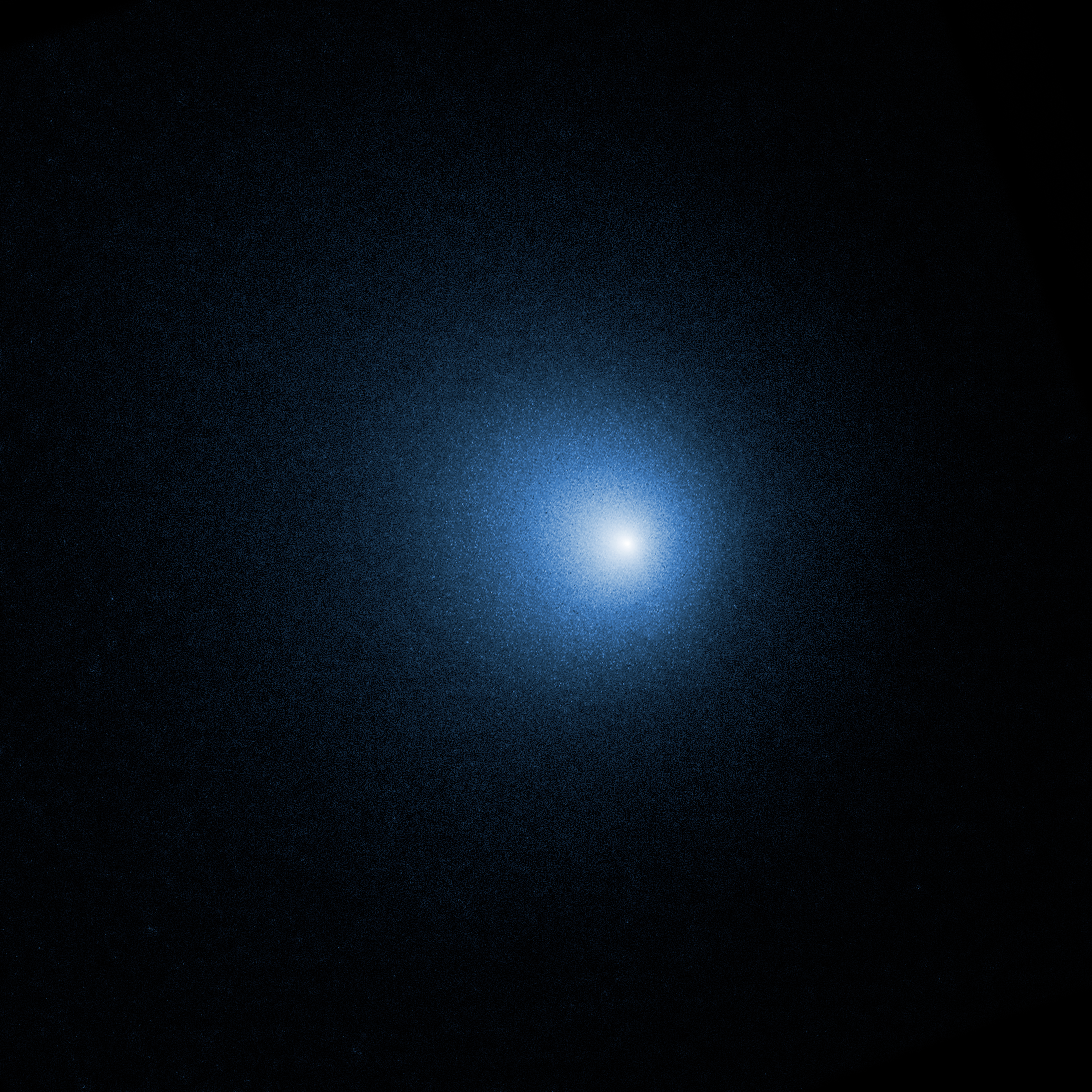

Comet 46P/Wirtanen

The NASA/ESA Hubble Space Telescope observed comet 46P/Wirtanen on 13 December 2018 when the comet was 12 million kilometers from Earth. In the image, the comet’s nucleus is hidden in the center of a fuzzy glow from the comet’s coma. The coma is a cloud of gas and dust that the comet has ejected during its pass through the inner Solar System due to heating from the Sun.

The inner part of a comet’s coma is normally not accessible from Earth. The close fly-by of comet 46P/Wirtanen allowed astronomers to study it in detail. They combined the unique capabilities of Hubble, NASA’s Chandra X-ray Observatory, and the Neil Gehrels-Swift observatory to study how gases are released from the nucleus, what the comet’s ices are composed of, and how gas in the coma is chemically altered by sunlight and solar radiation.

Comet 46P/Wirtanen made its closest approach to Earth on 16 December, when it passed just over 11 million kilometers from our planet, about 30 times farther away than the Moon. Although it is the brightest comet of 2018, 46P/Wirtanen is only barely visible to the unaided eye. It is best viewed through binoculars or a telescope.

Comet 46P/Wirtanen orbits the Sun once every 5.4 years, much quicker than the 75-year orbit of the more famous Comet Halley. Most of its passes through the inner Solar System are much farther from Earth, making this display particularly notable.

Credit: NASA, ESA, and D. Bodewits (Auburn University) and J.-Y. Li (Planetary Science Institute)